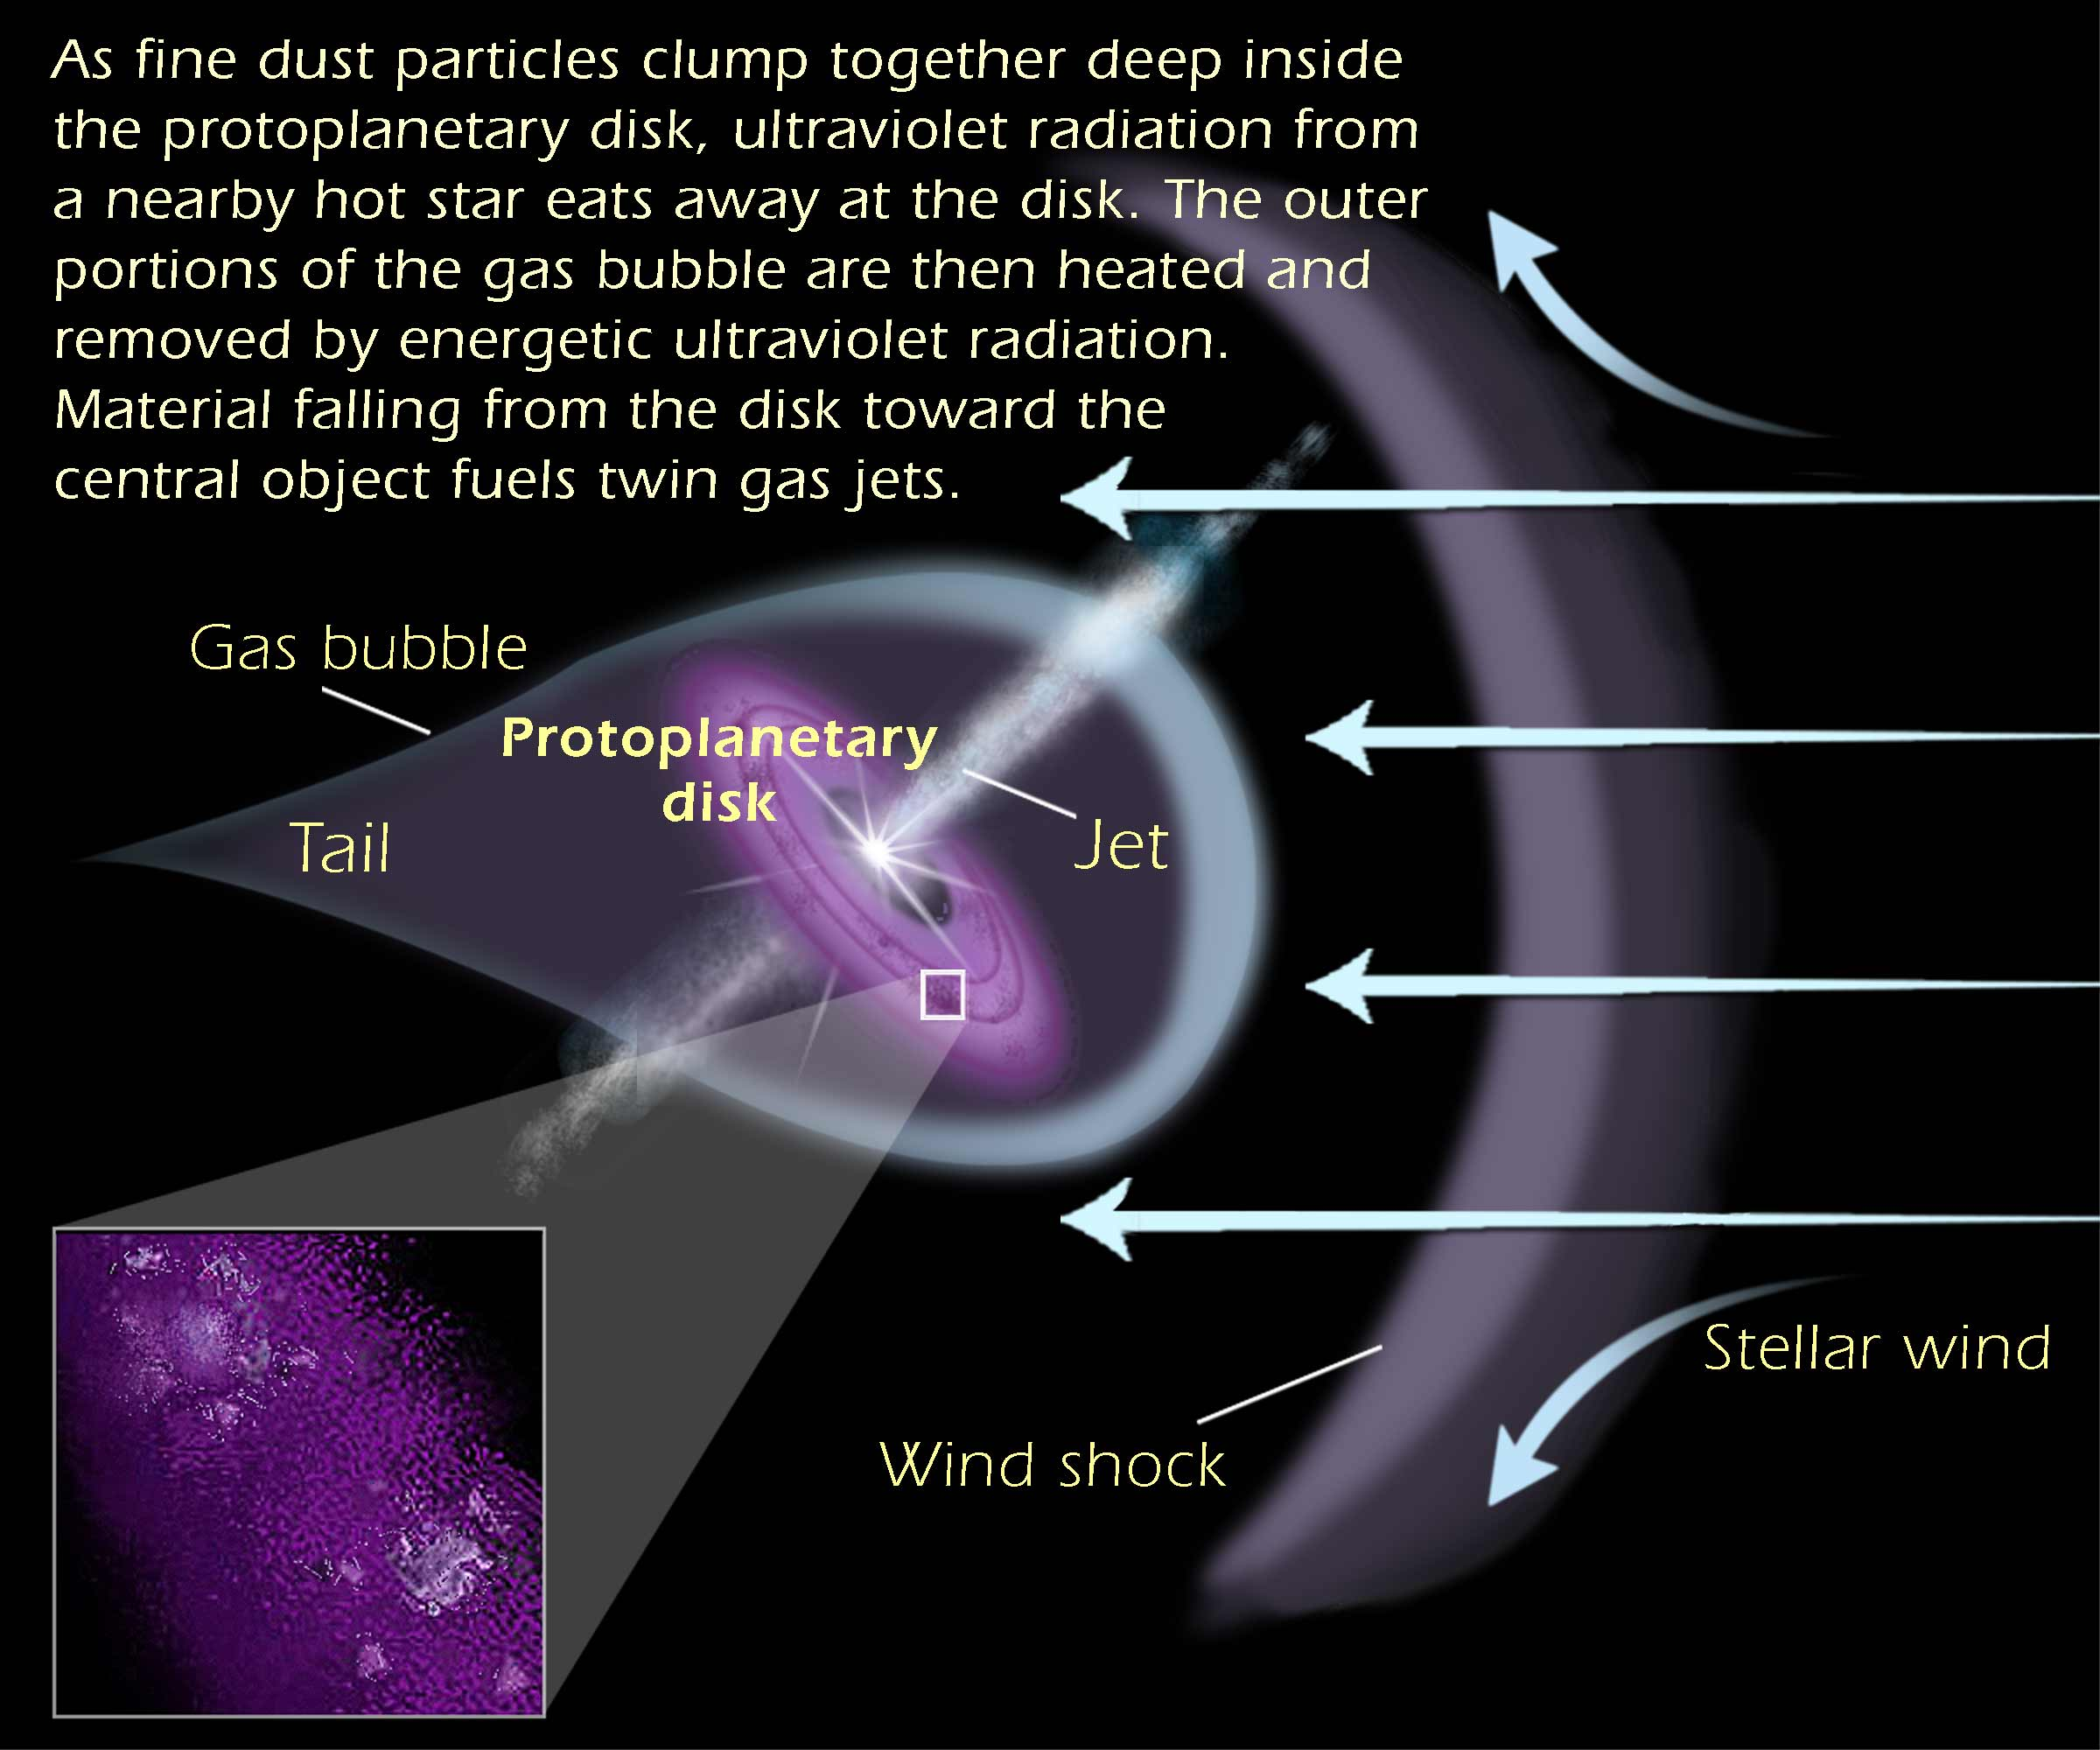

Anatomy of a protoplanetary disk

Anatomy of a protoplanetary disk: As fine dust particles clump together deep inside the protoplanetary disk, ultraviolet radiation from a neaby hot star eats away at the disk. The outer portions of the gas bubble are then heated and removed by energetic ultraviolet radiation. Material falling from the disk toward the central object fuels twin gas jets.

Credit: Ann Feild (STScI)